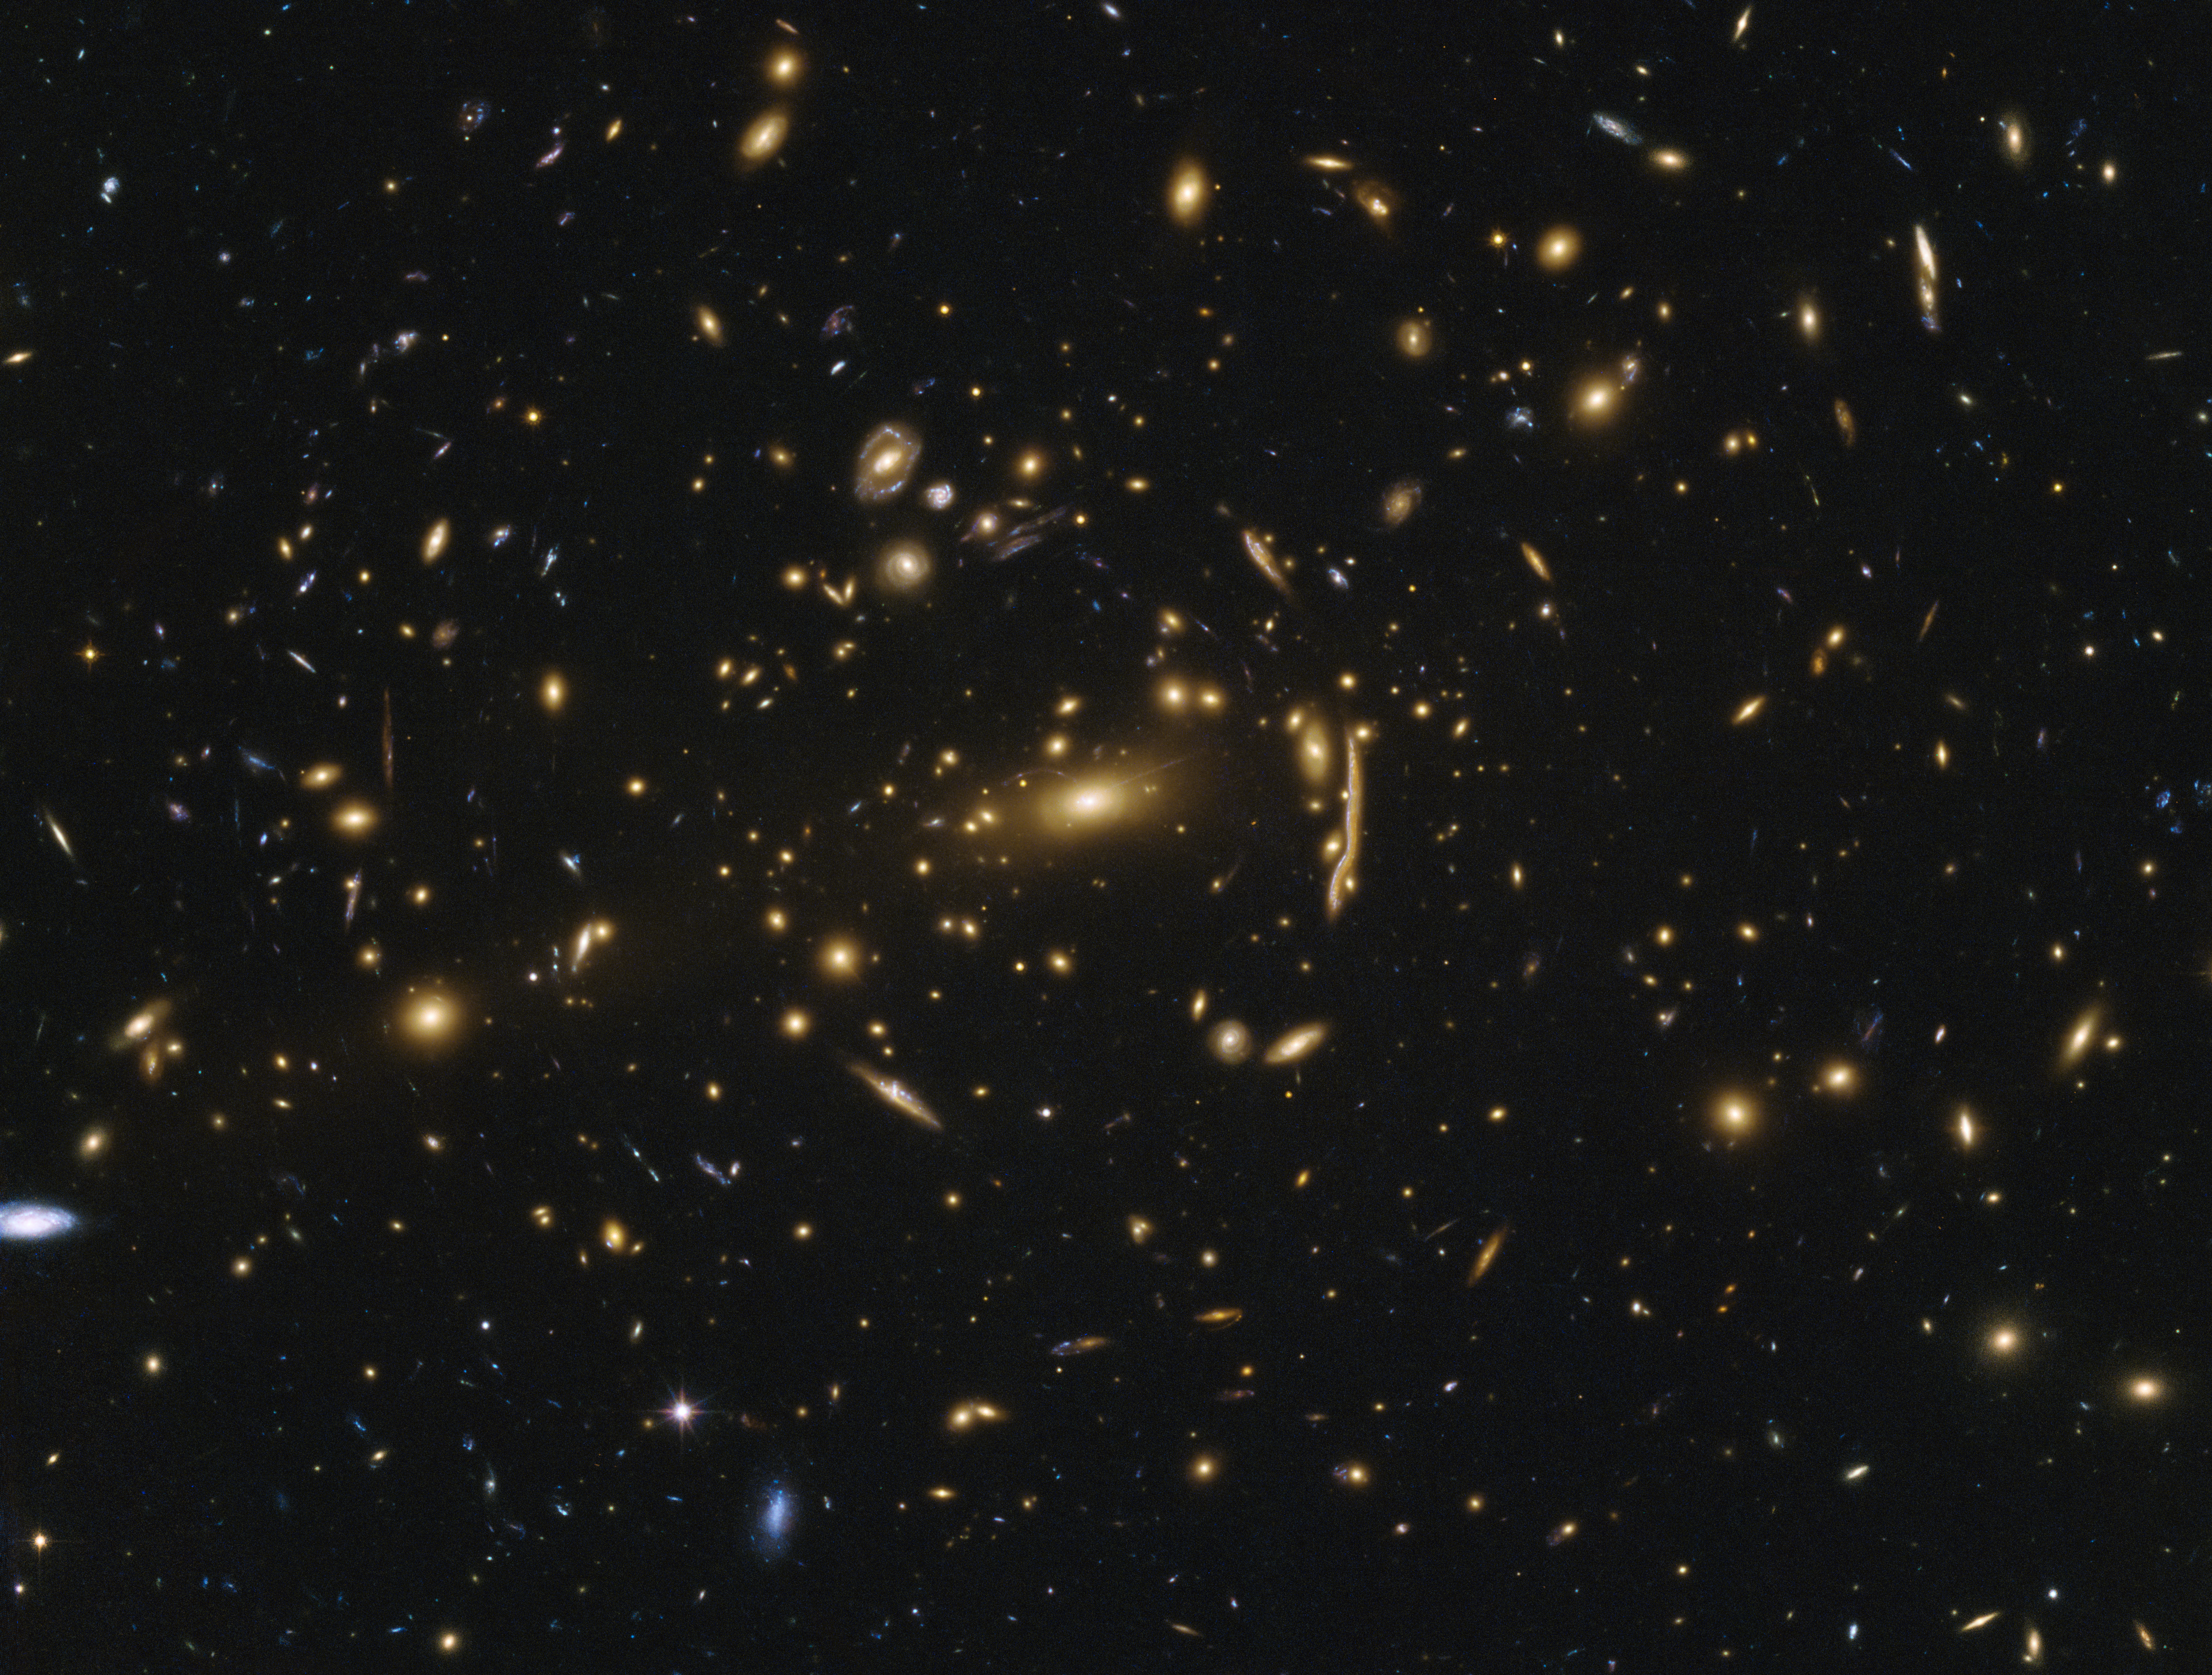

Galaxy cluster MACSJ1206

This image shows the galaxy cluster MACSJ1206.2-0847. The cluster is so far away, it took the light from the cluster more than 4.5 billion years to reach Earth. But the cluster itself is not even the most distant object in this image. Light from even more distant, high-redshift galaxies arrives at Earth, having been distorted by the gigantic gravitational influence of the intervening cluster. Objects, otherwise faint and tiny, get brighter and are magnified. Sometimes gravitational lensing can even produce multiple images of the object as light is bent in different directions around the foreground cluster.

One of these galaxies is the Cosmic Snake — clearly visible as a stretched object to the right of the central galaxy. This image of the Cosmic Snake is actually composed by four elongated and stretched images of the southern half of the source galaxy.

Credit: ESA/Hubble & NASA